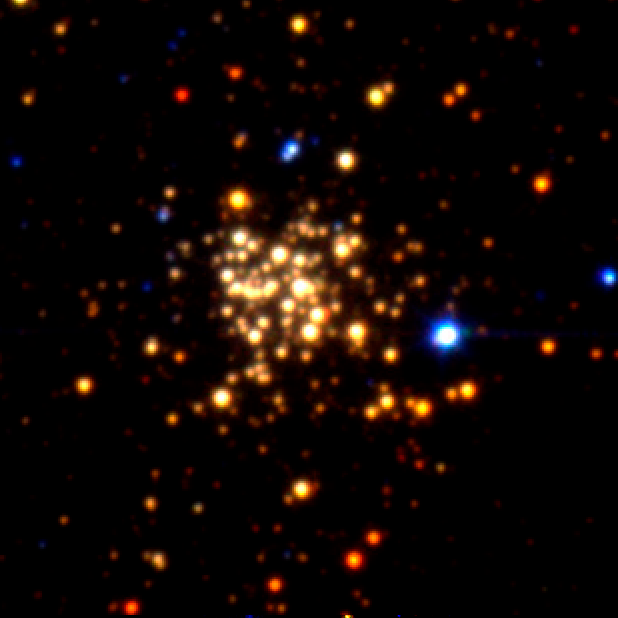

Arches Cluster: Keck I 10m (1996)

This picture was taken in 1996 using the 10 metre Keck telescope at Hawaii. It presents the Arches Cluster, the densest known star cluster in the Milky Way. The cluster is located about 25 000 light years from Earth in the constellation of Sagattrius. The radius of the cluster is only about one light year, but it contains about 150 stars, all of which are larger and more massive than the Sun.

Credit: G. Serabyn (JPL), D. Shupe (Caltech) and D. Figer (STScI)